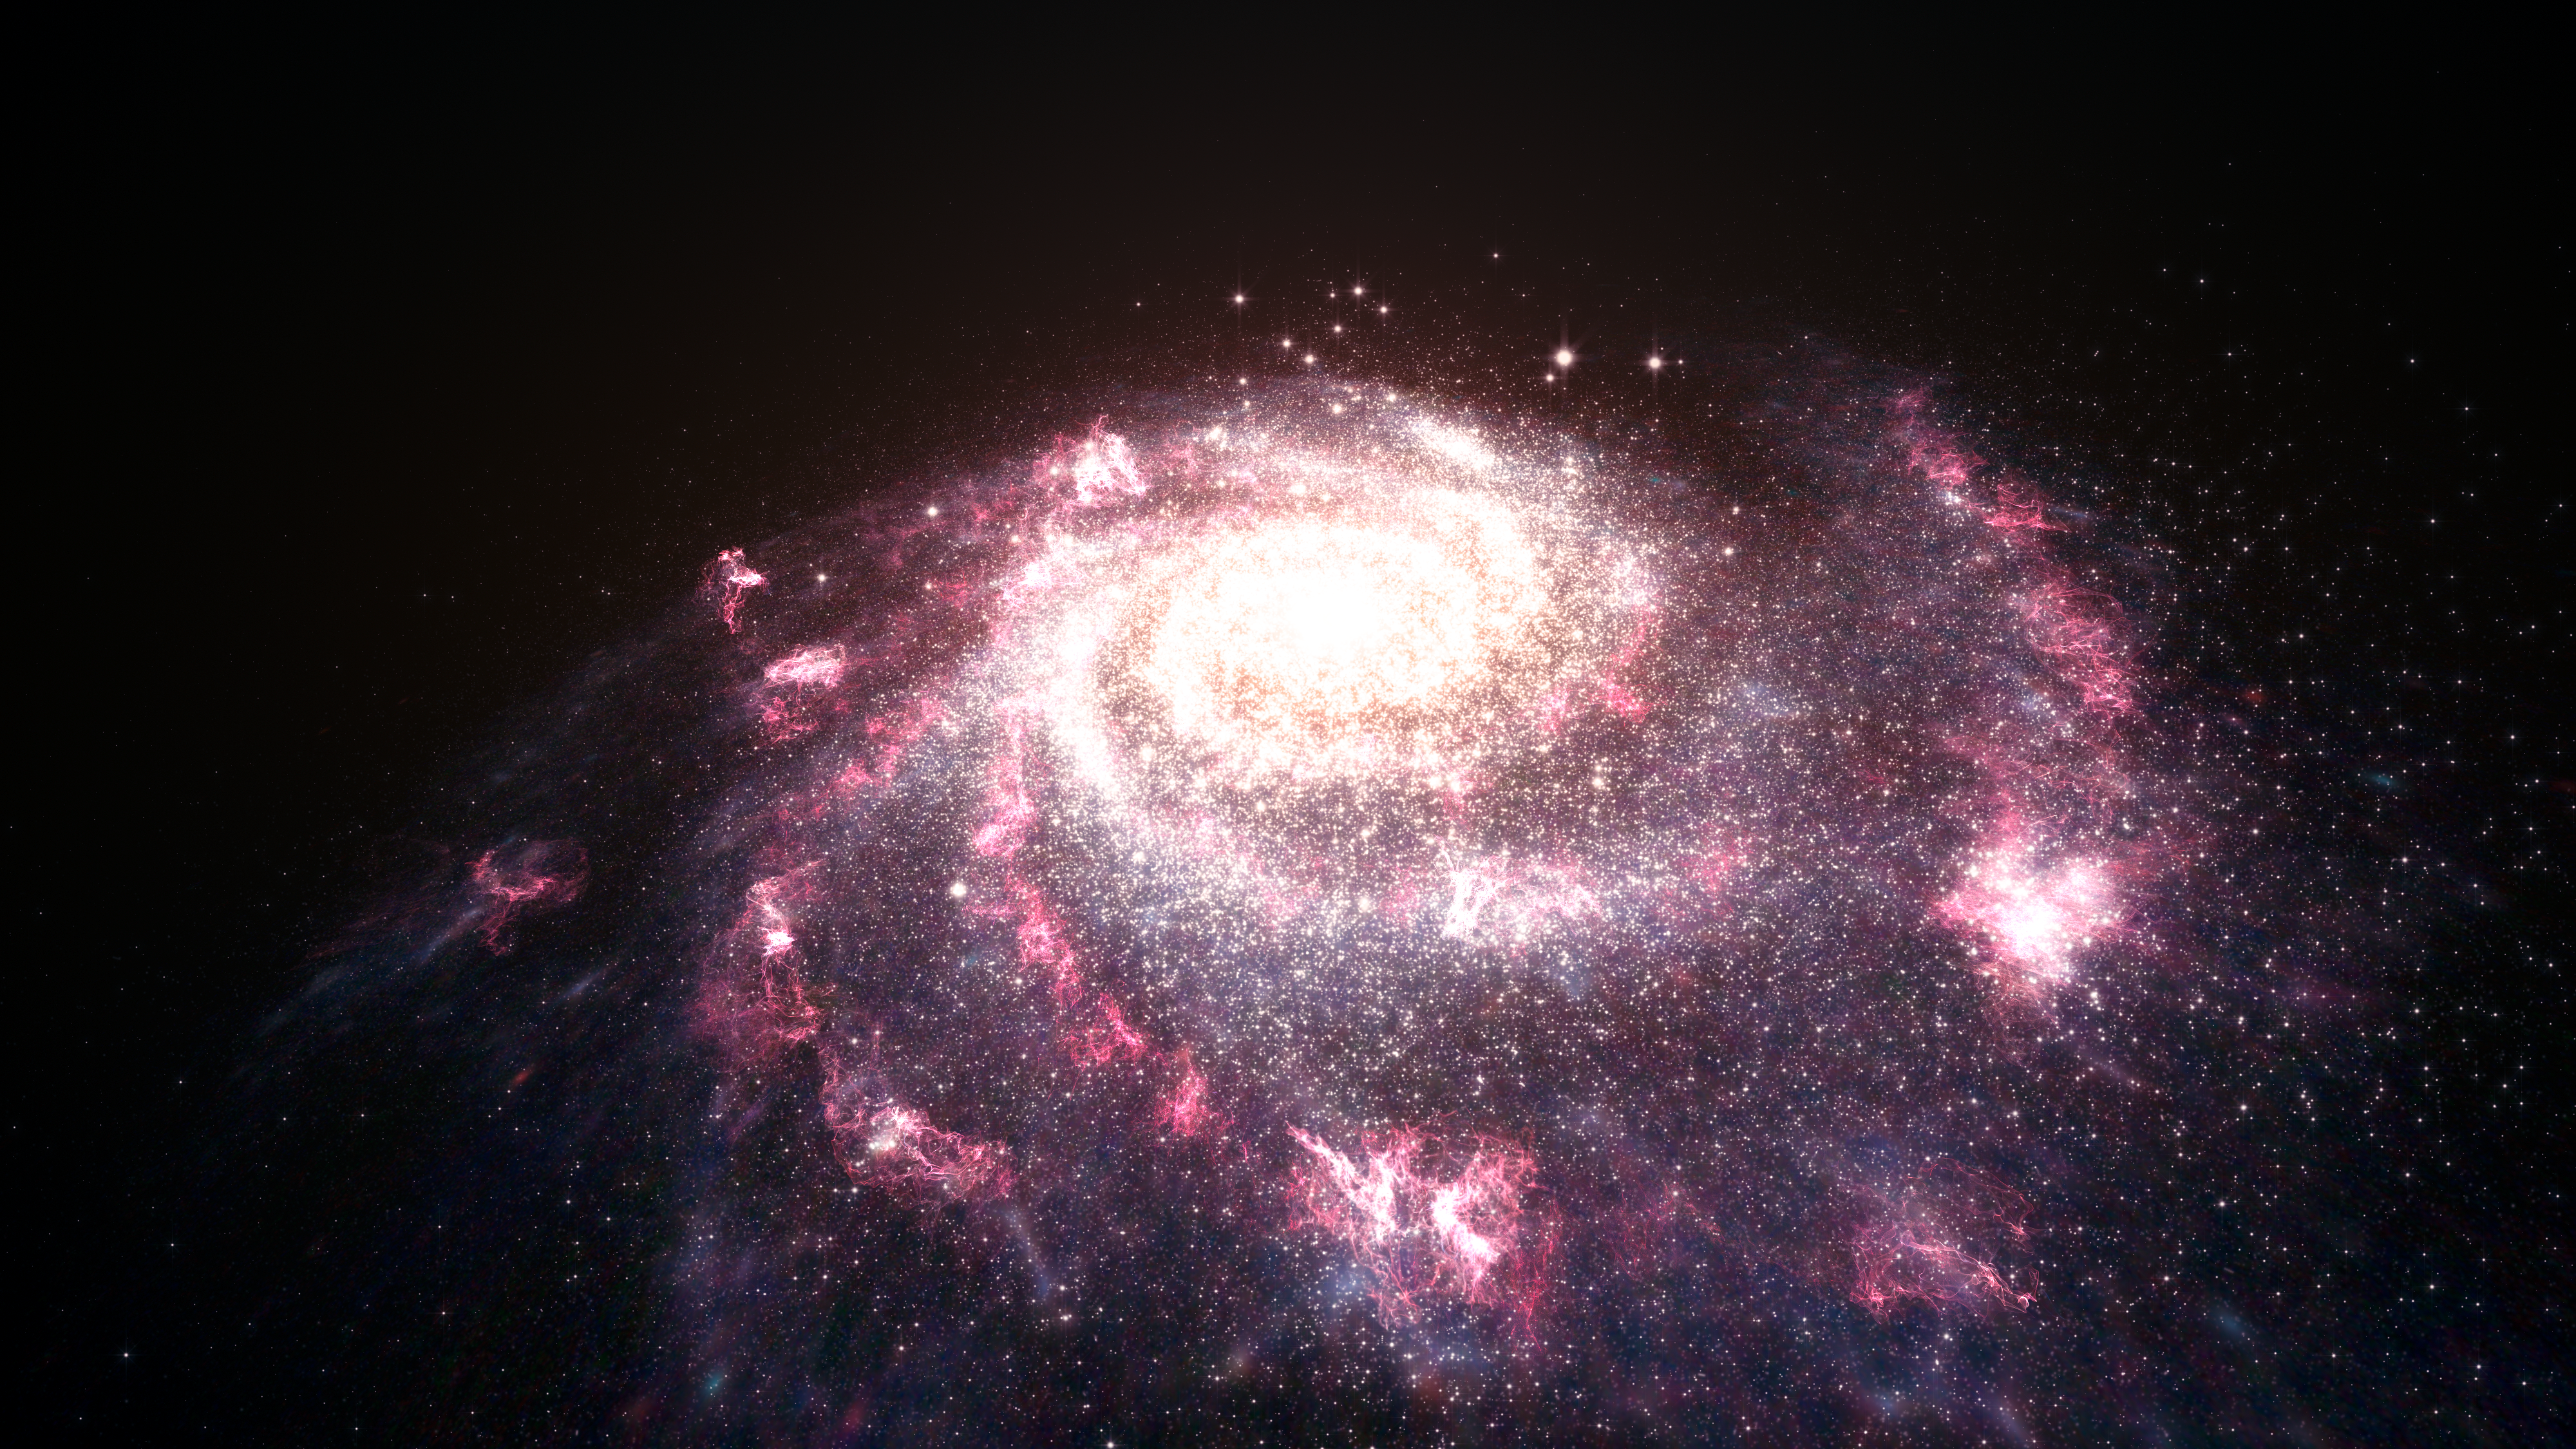

Artist's impression of a galaxy undergoing a starburst

This illustration shows a messy, chaotic galaxy undergoing bursts of star formation. This star formation is intense; it was known that it affects its host galaxy, but this new research shows it has an even greater effect than first thought. The winds created by these star formation processes stream out of the galaxy, ionising gas at distances of up to 650 000 light-years from the galactic centre.

Credit: ESA, NASA, L. Calçada